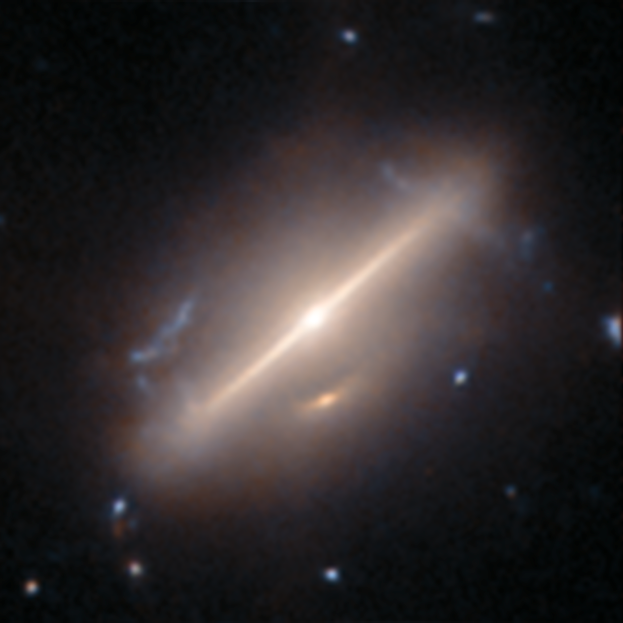

An anomaly from Hubble’s archive — Merging galaxies 1

This is a previously-undiscovered astrophysical anomaly, found in the Hubble Space Telescope’s archive by researchers using a new AI-assisted method. The AI tool allowed them to sift through nearly 100 million image cutouts in just days, turning up rare and anomalous objects like this one.

This oval-shaped galaxy is perhaps most striking for the long, thin beam of light stretching across its centre. This is thought to be the result of a galaxy merger. A less conspicuous feature is the small arc of light just below the galaxy’s core. This is thought to be the secondary galaxy in the merger, or a potential image formed by gravitational lensing, where the mass of the foreground galaxy has bent light from a distant galaxy behind it to create the small arc of light.

Read more about this new research here.

Credit: ESA/Hubble & NASA, D. O’Ryan, P. Gómez (European Space Agency), M. Zamani (ESA/Hubble)